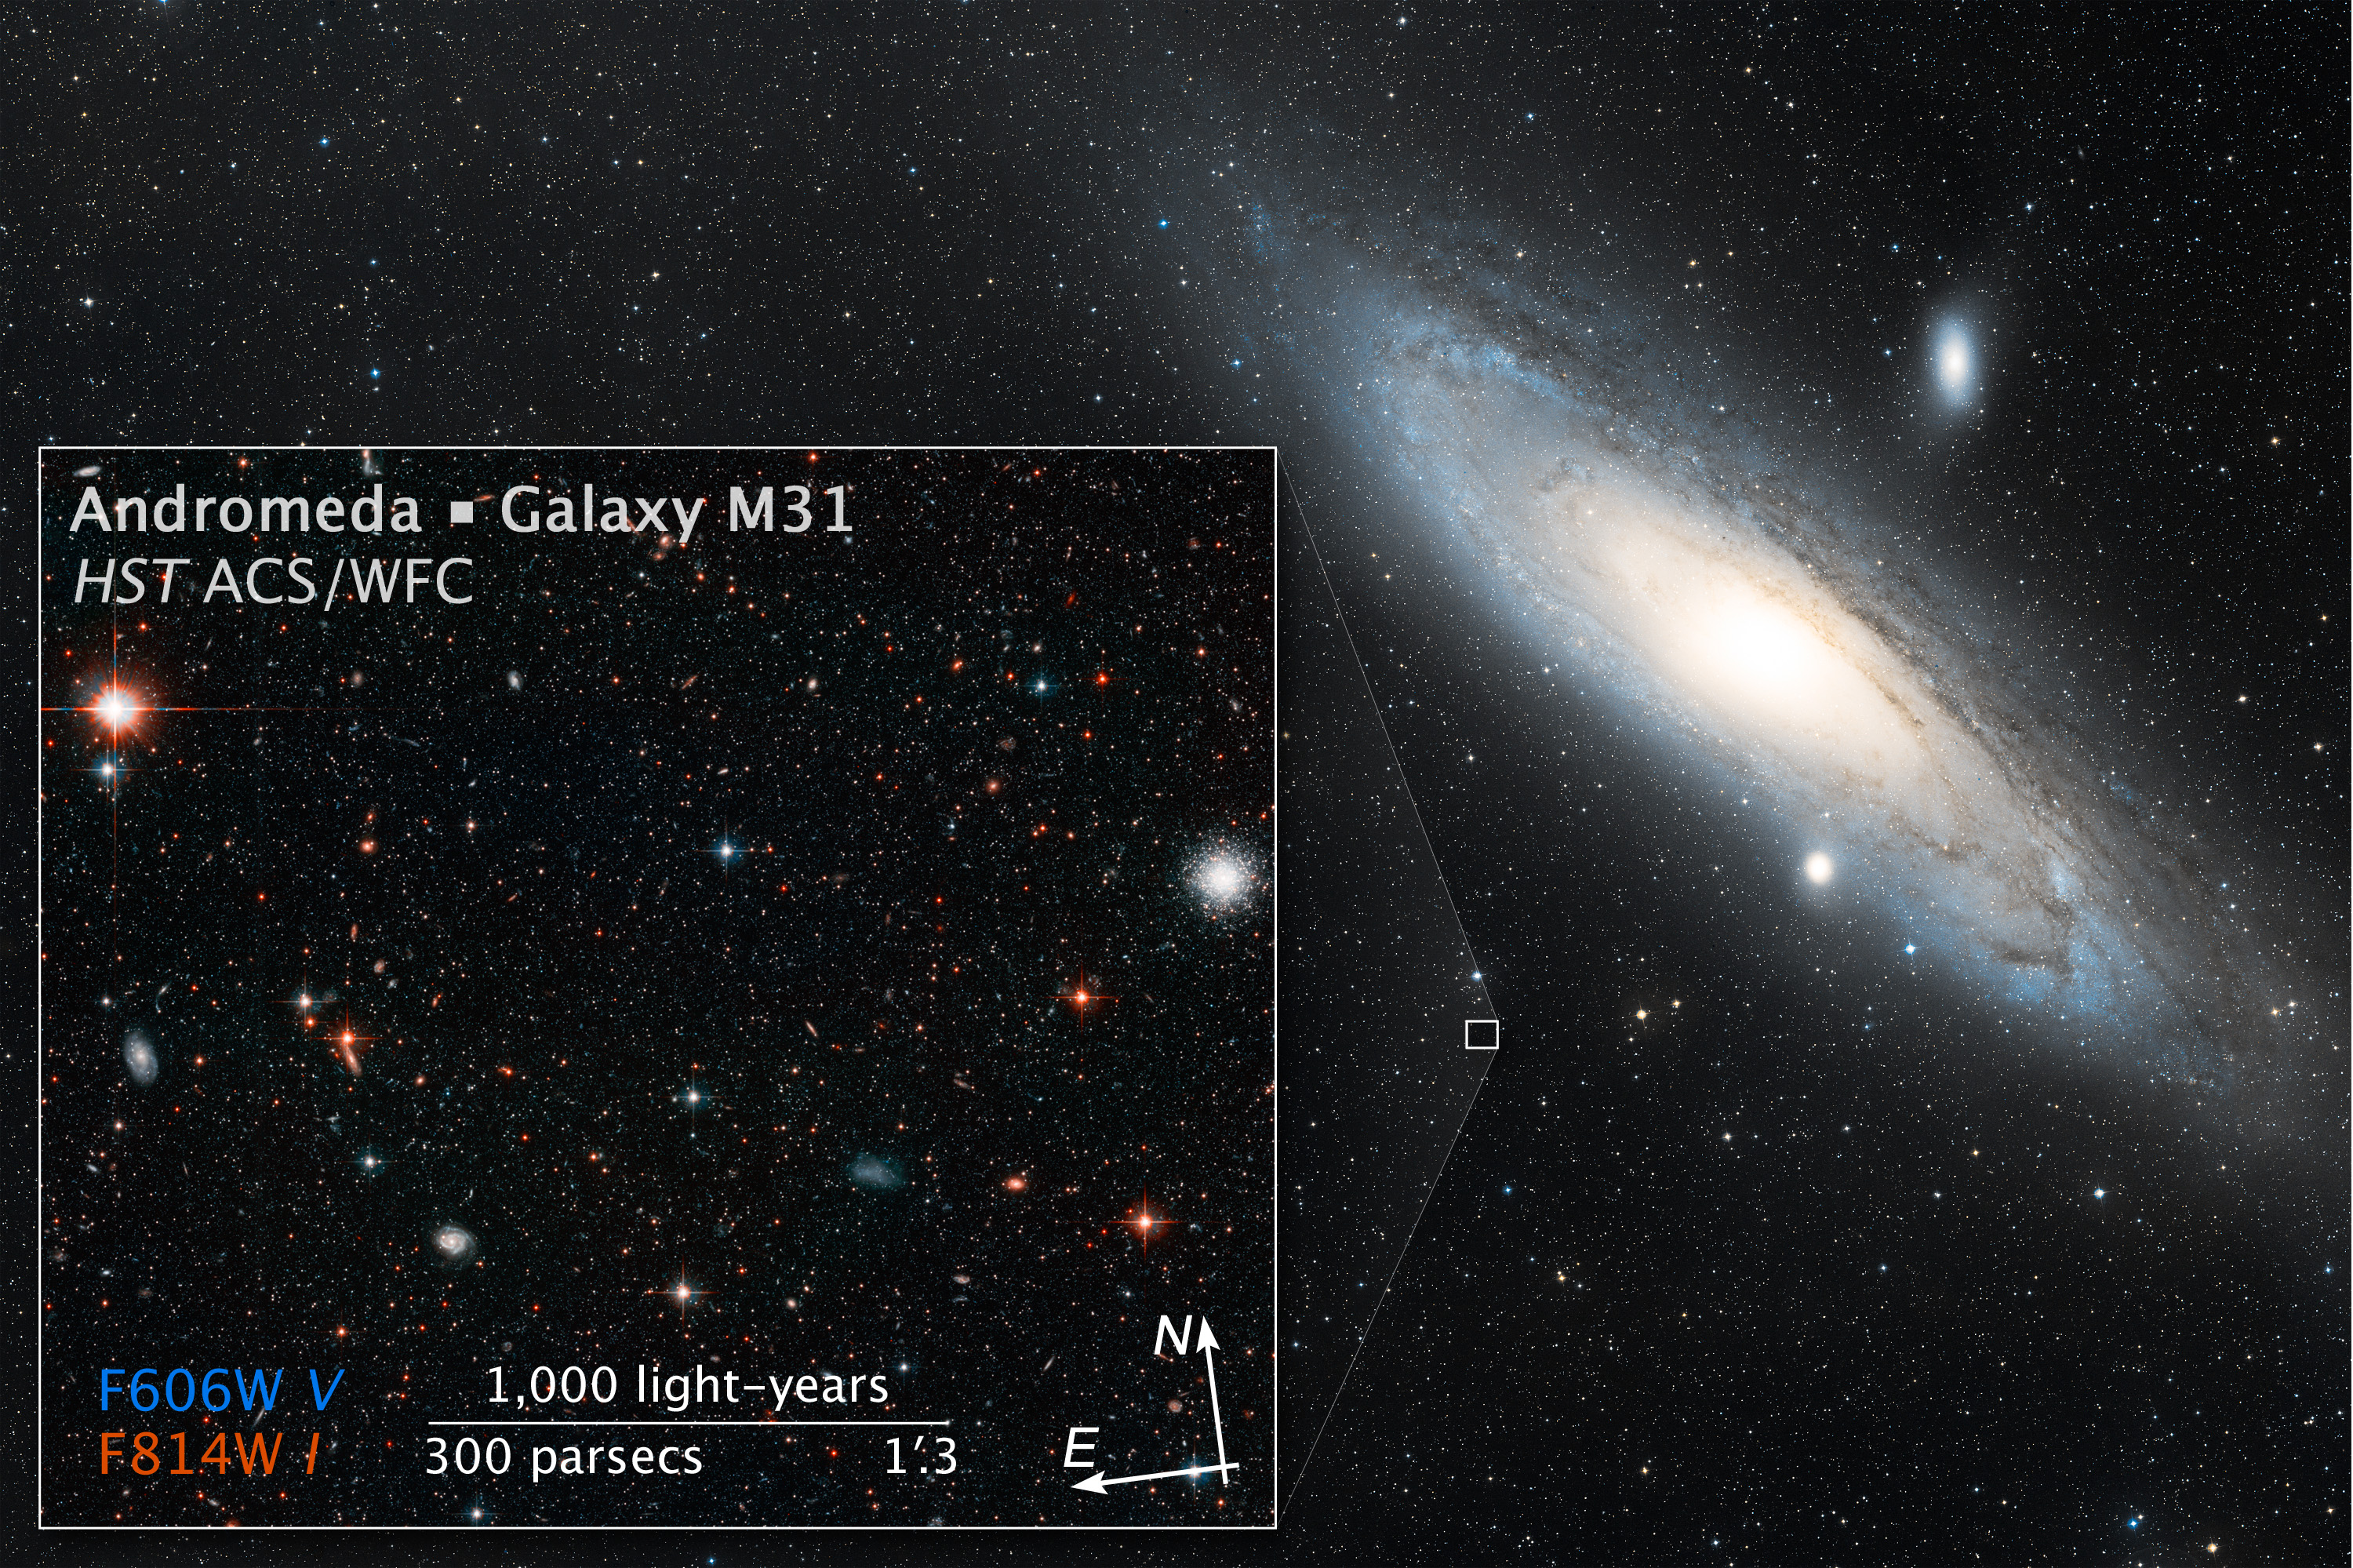

Wide-field view of the Andromeda Galaxy

This ground-based image shows the full extent of the Andromeda Galaxy, also known as Messier 31 or M 31. The Andromeda Galaxy appears very large in the sky — several times the size of the full Moon (although much fainter). Hubble is designed to make highly detailed observations of much smaller patches of sky: the space telescope’s observations of the Andromeda Galaxy show individual stars and clusters rather than the broad spiral structure visible here. Wide-field images like this one give a broad overview.

Credit: NASA, ESA, and Z. Levay (STScI). Acknowledgment: Davide De Martin (ESA/Hubble)